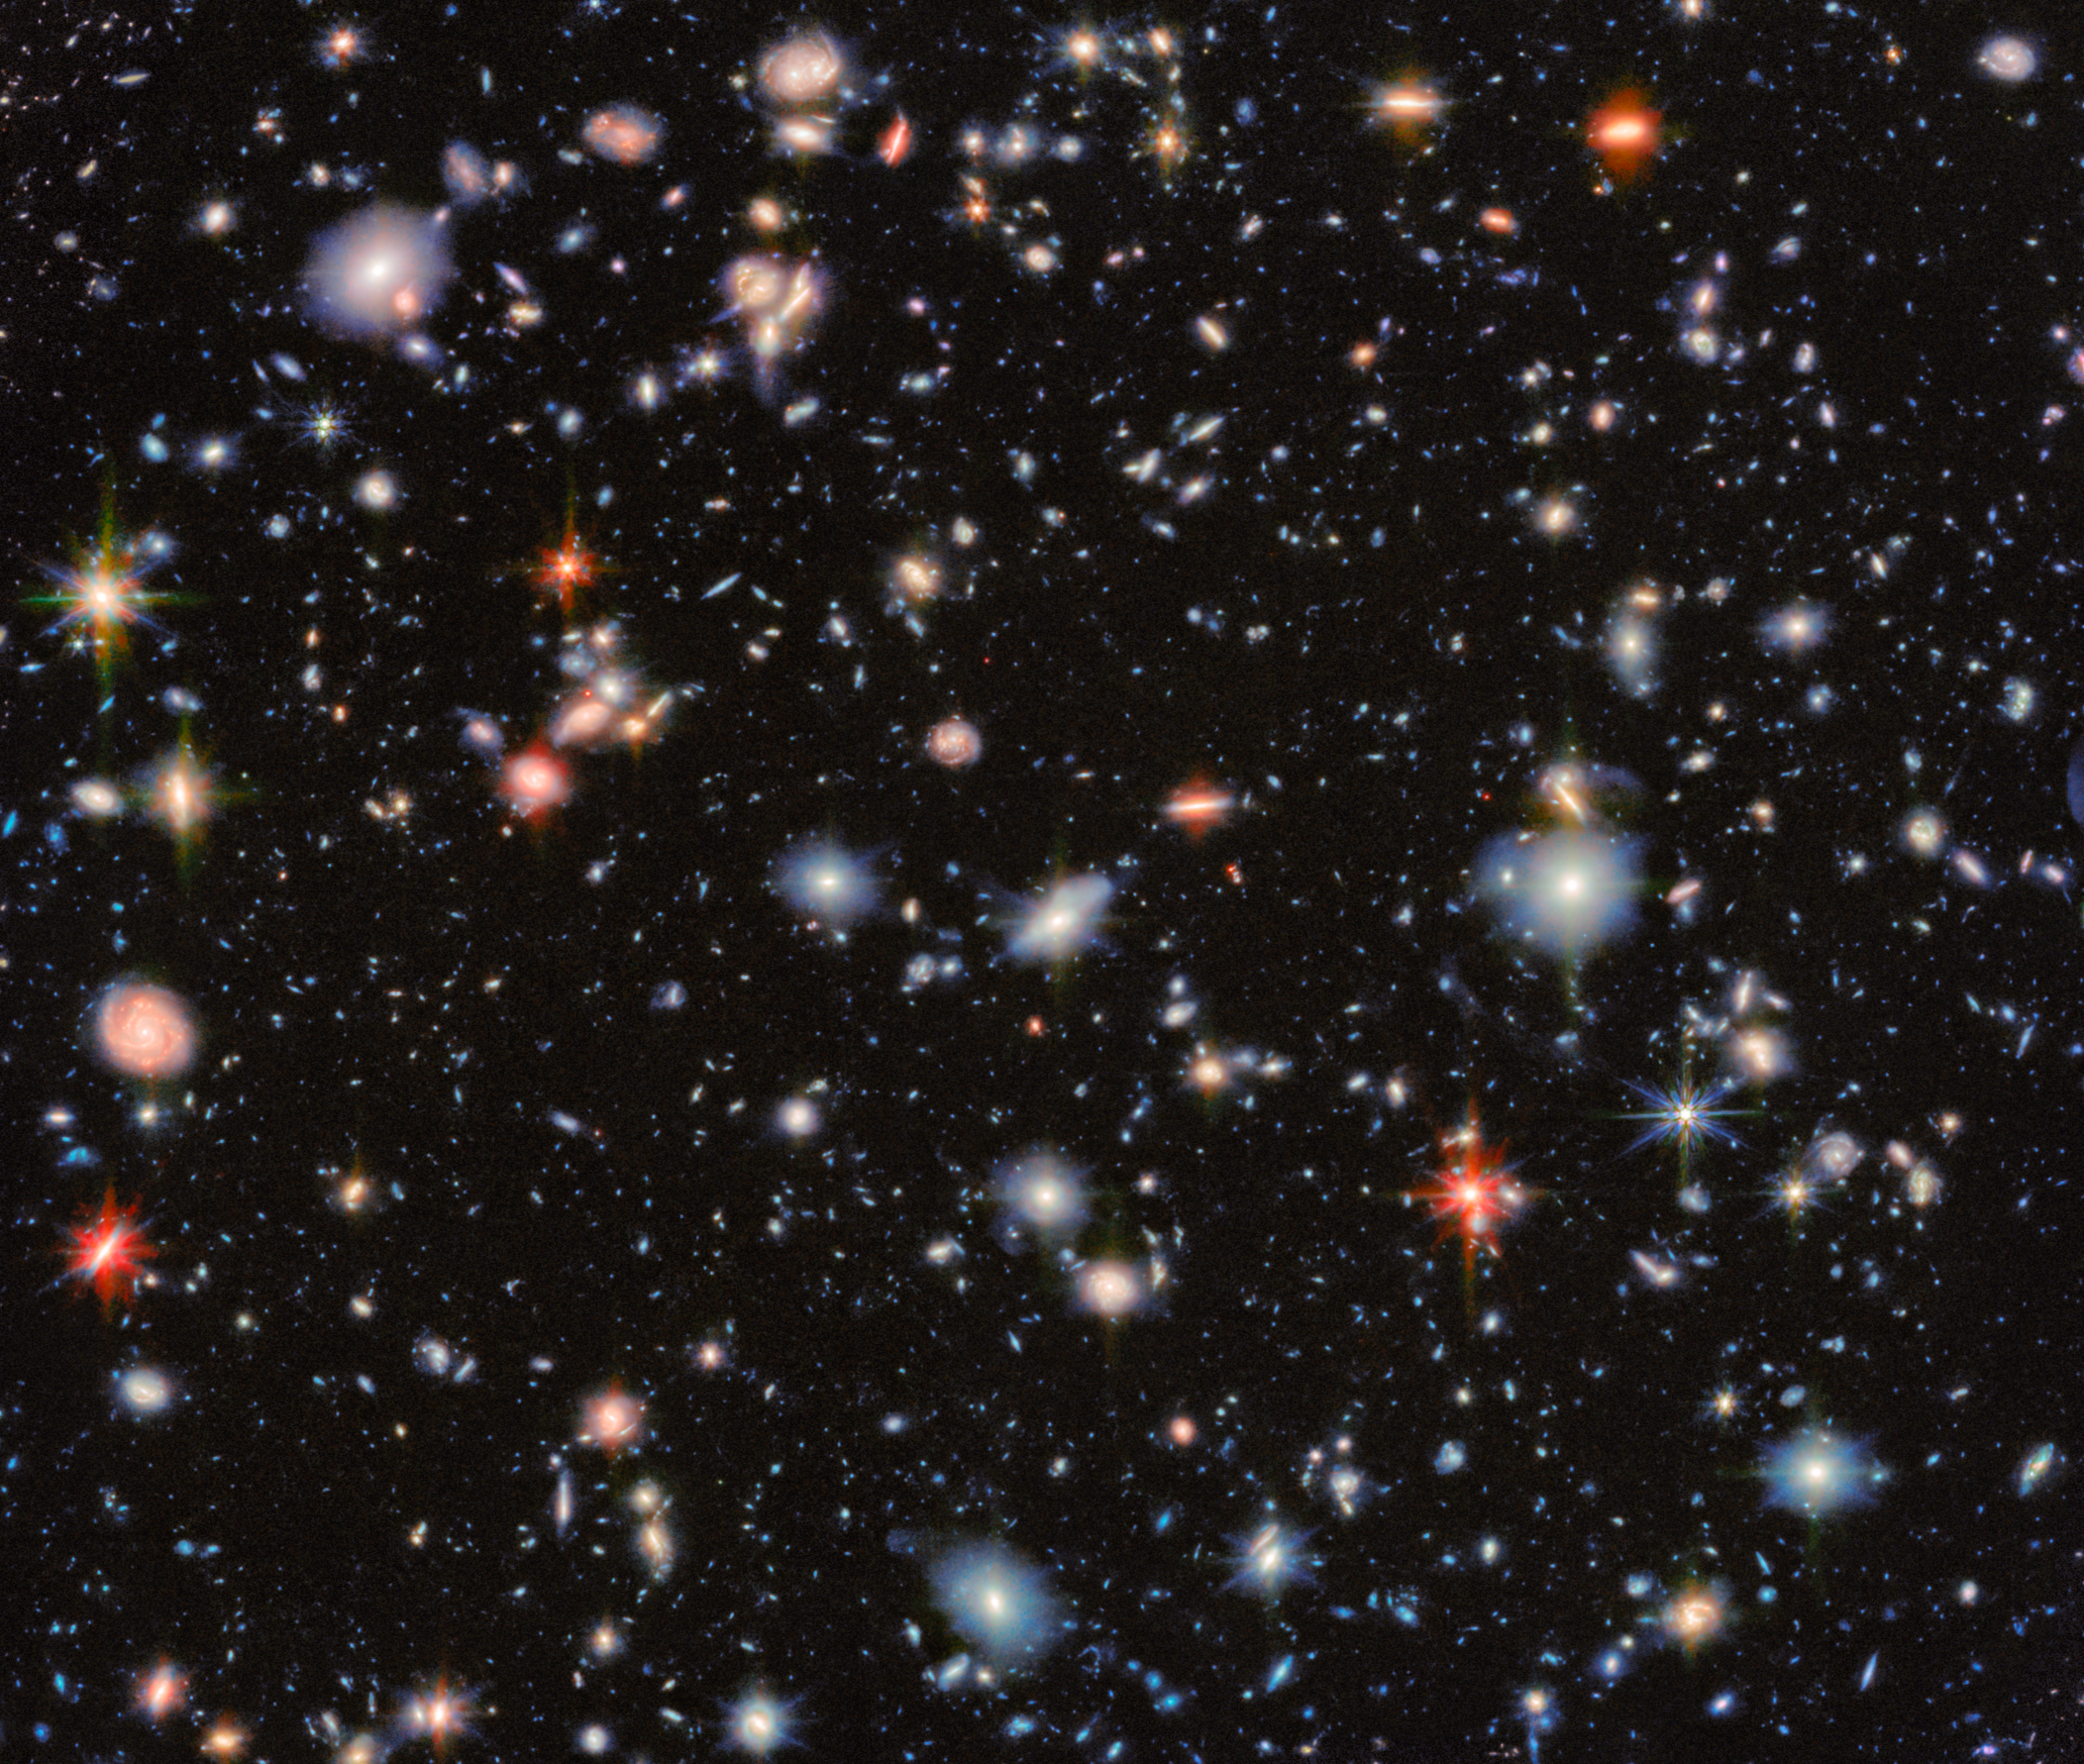

A fresh look at a classic deep field

This image from the NASA/ESA/CSA James Webb Space Telescope revisits one of the most iconic regions of the sky, the Hubble Ultra Deep Field, through the eyes of two of Webb’s instruments. The result is a detailed view that reveals thousands of distant galaxies, some dating back to the earliest periods of cosmic history.

The field shown here, known as the MIRI Deep Imaging Survey (MIDIS) region, was observed with the three shortest-wavelength filters of Webb’s Mid-Infrared Instrument (MIRI) for nearly 100 hours in total. This included Webb's longest observation of an extragalactic field in one filter so far, producing one of the deepest views ever obtained of the Universe. Combined with data from Webb’s Near-Infrared Camera (NIRCam), this image allows astronomers to explore how galaxies formed and evolved over billions of years.

These deep observations have revealed more than 2500 sources in this tiny patch of sky. Among them are hundreds of extremely red galaxies — some of which are likely massive, dust-obscured systems or evolved galaxies with mature stars that formed early in the Universe’s history. Thanks to Webb’s sharp resolution, even at mid-infrared wavelengths, researchers can resolve the structures of many of these galaxies and study how their light is distributed, shedding light on their growth and evolution.

In this image, the colours that have been assigned to different kinds of infrared light highlight the fine distinctions astronomers can make with this deep data. Orange and red represent the longest mid-infrared wavelengths. The galaxies in these colours have extra features — such as high concentrations of dust, copious star formation, or an active galactic nucleus (AGN) at their centre — which emit more of this farther infrared light. Small, greenish-white galaxies are particularly distant, with high redshift. This shifts their light spectrum into the peak mid-infrared wavelengths of the data, which are depicted in white and green. Most of the galaxies in this image lack any such mid-infrared boosting features, leaving them most bright at shorter near-infrared wavelengths, which are depicted with blue and cyan colours.

By returning to this legacy field first made famous by the NASA/ESA Hubble Space Telescope, Webb is continuing and expanding the deep field tradition — revealing new details, uncovering previously hidden galaxies, and offering fresh insights into the formation of the first cosmic structures.

The MIRI observations were taken as part of the Webb programmes #1283 and #6511 (PI: G. Östlin).

Credit: ESA/Webb, NASA & CSA, G. Östlin, P. G. Perez-Gonzalez, J. Melinder, the JADES Collaboration, the MIDIS collaboration, M. Zamani (ESA/Webb)